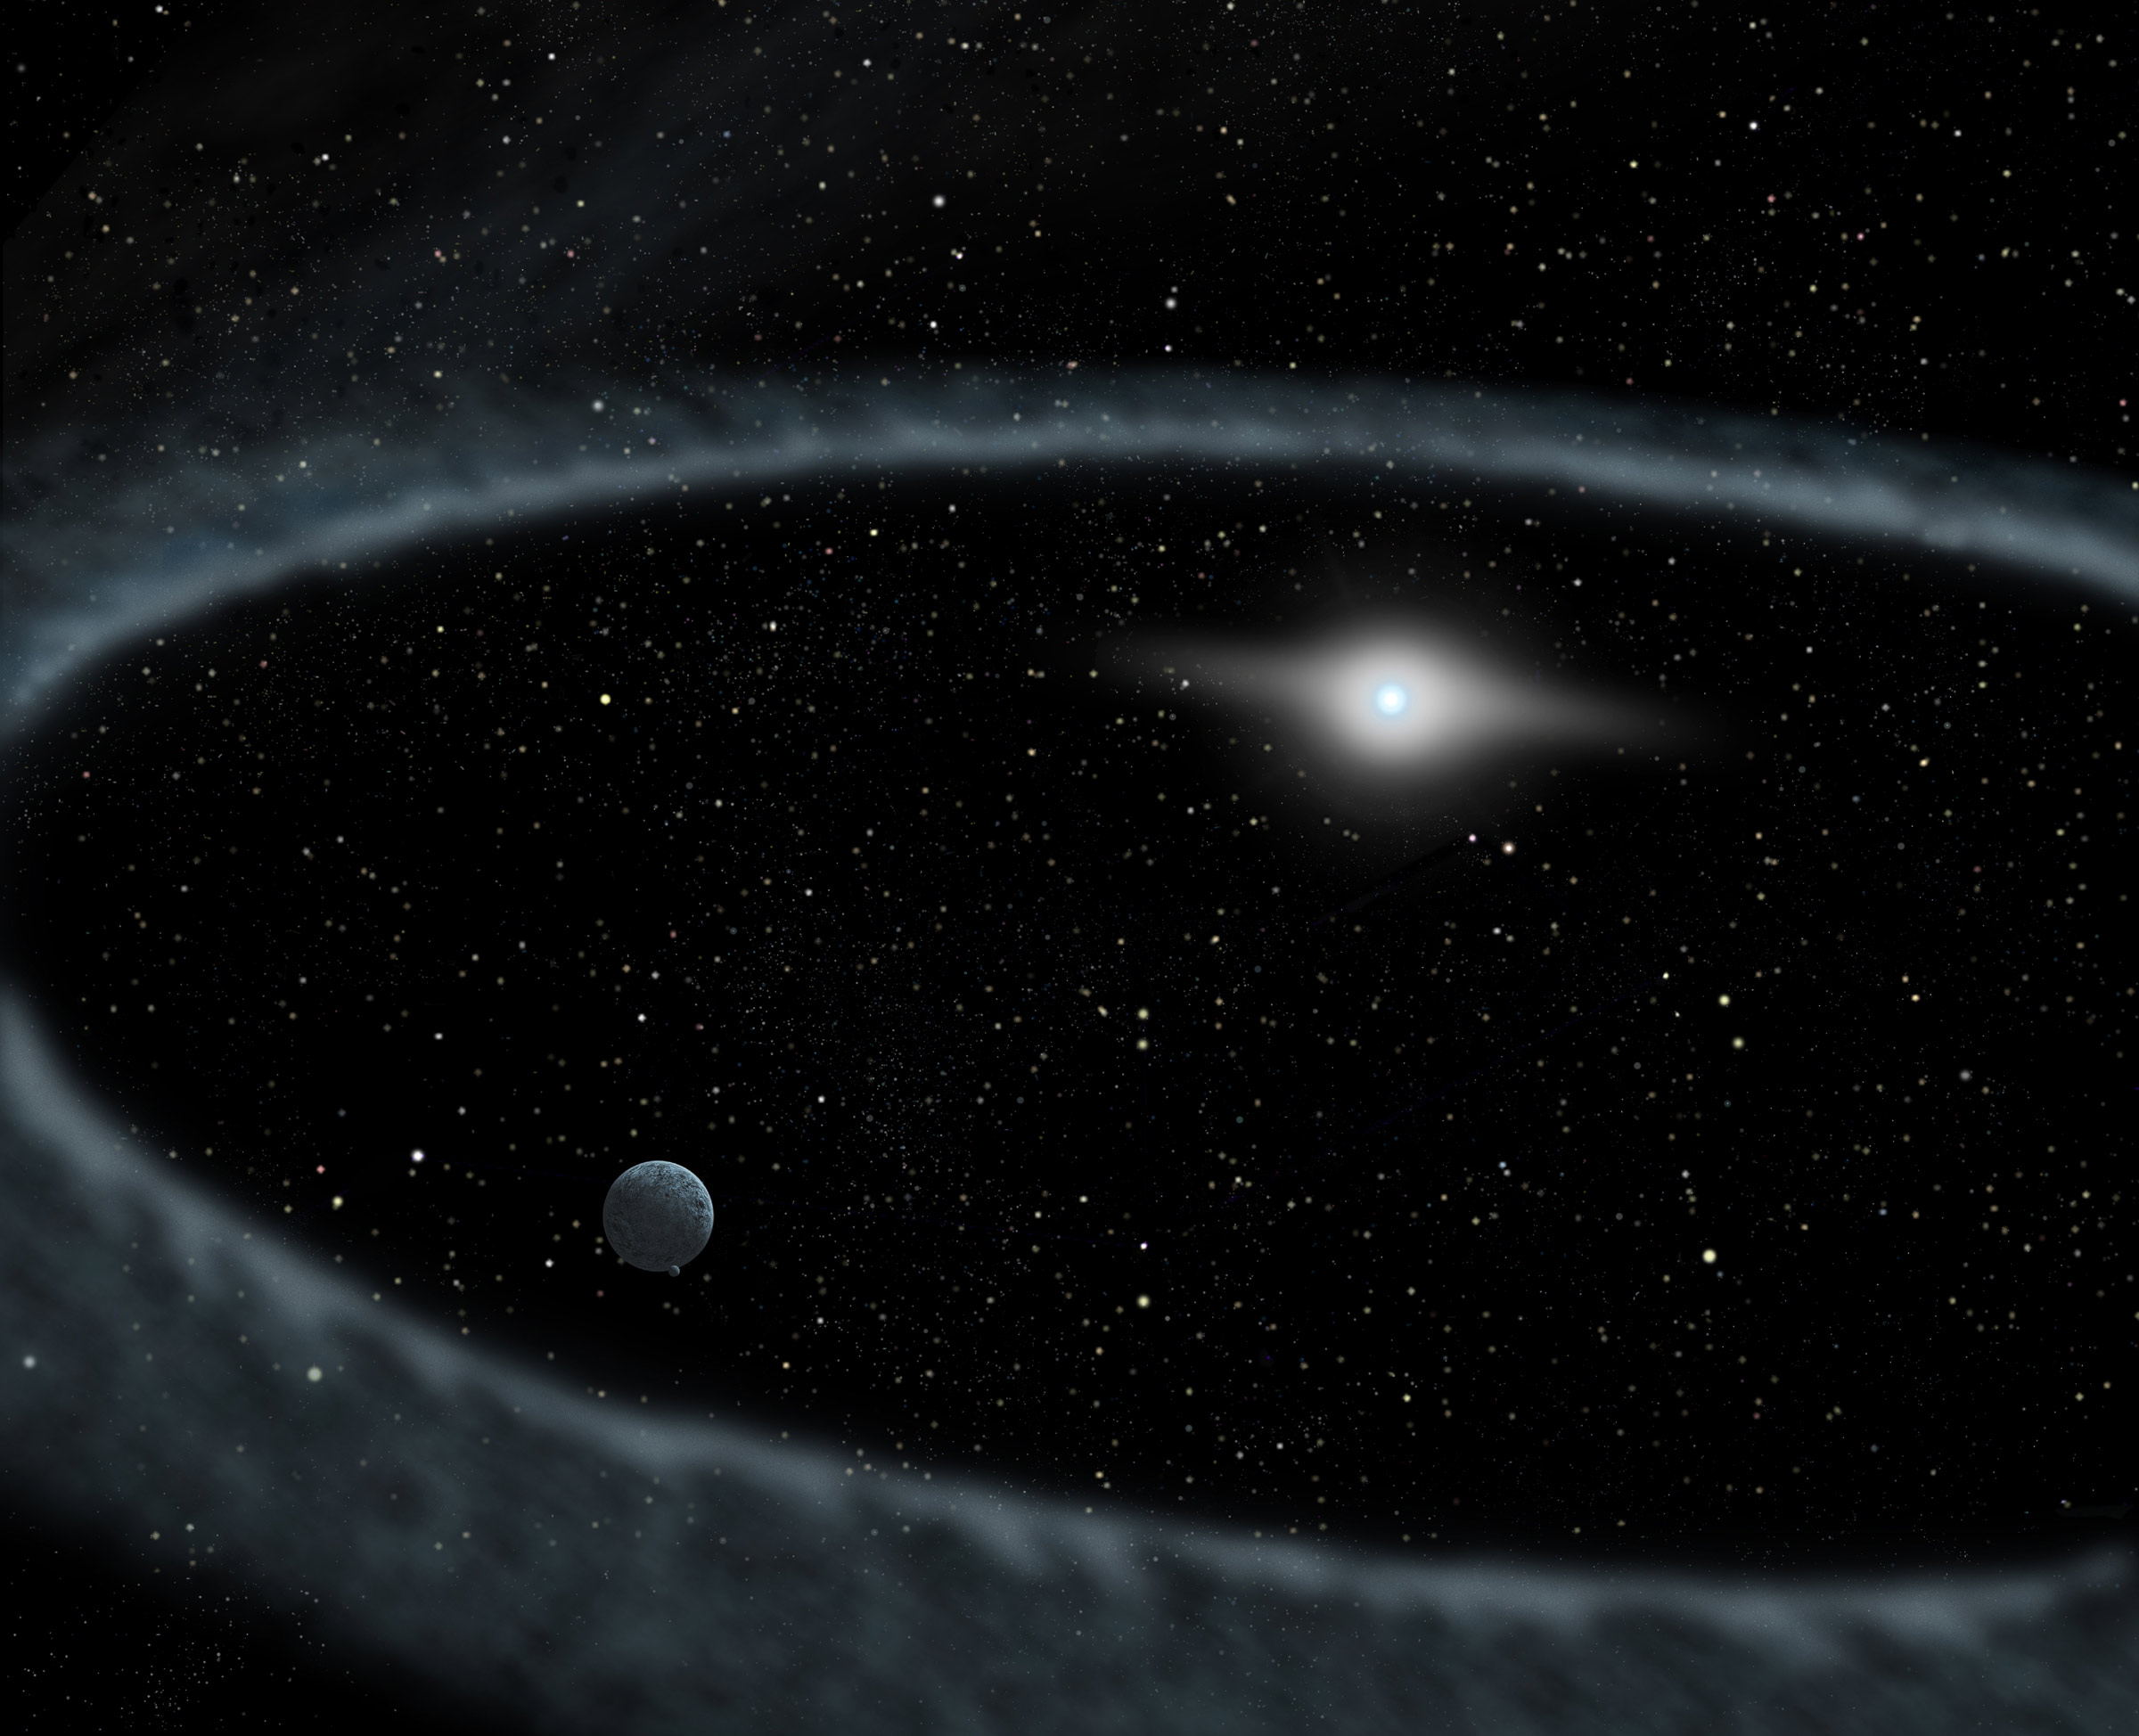

Fomalhaut Ring Artwork

This illustration shows a ring of debris encircling the star Fomalhaut. The suspected planet is orbiting inside the ring.

Credit: NASA, ESA and A. Feild (STScI)